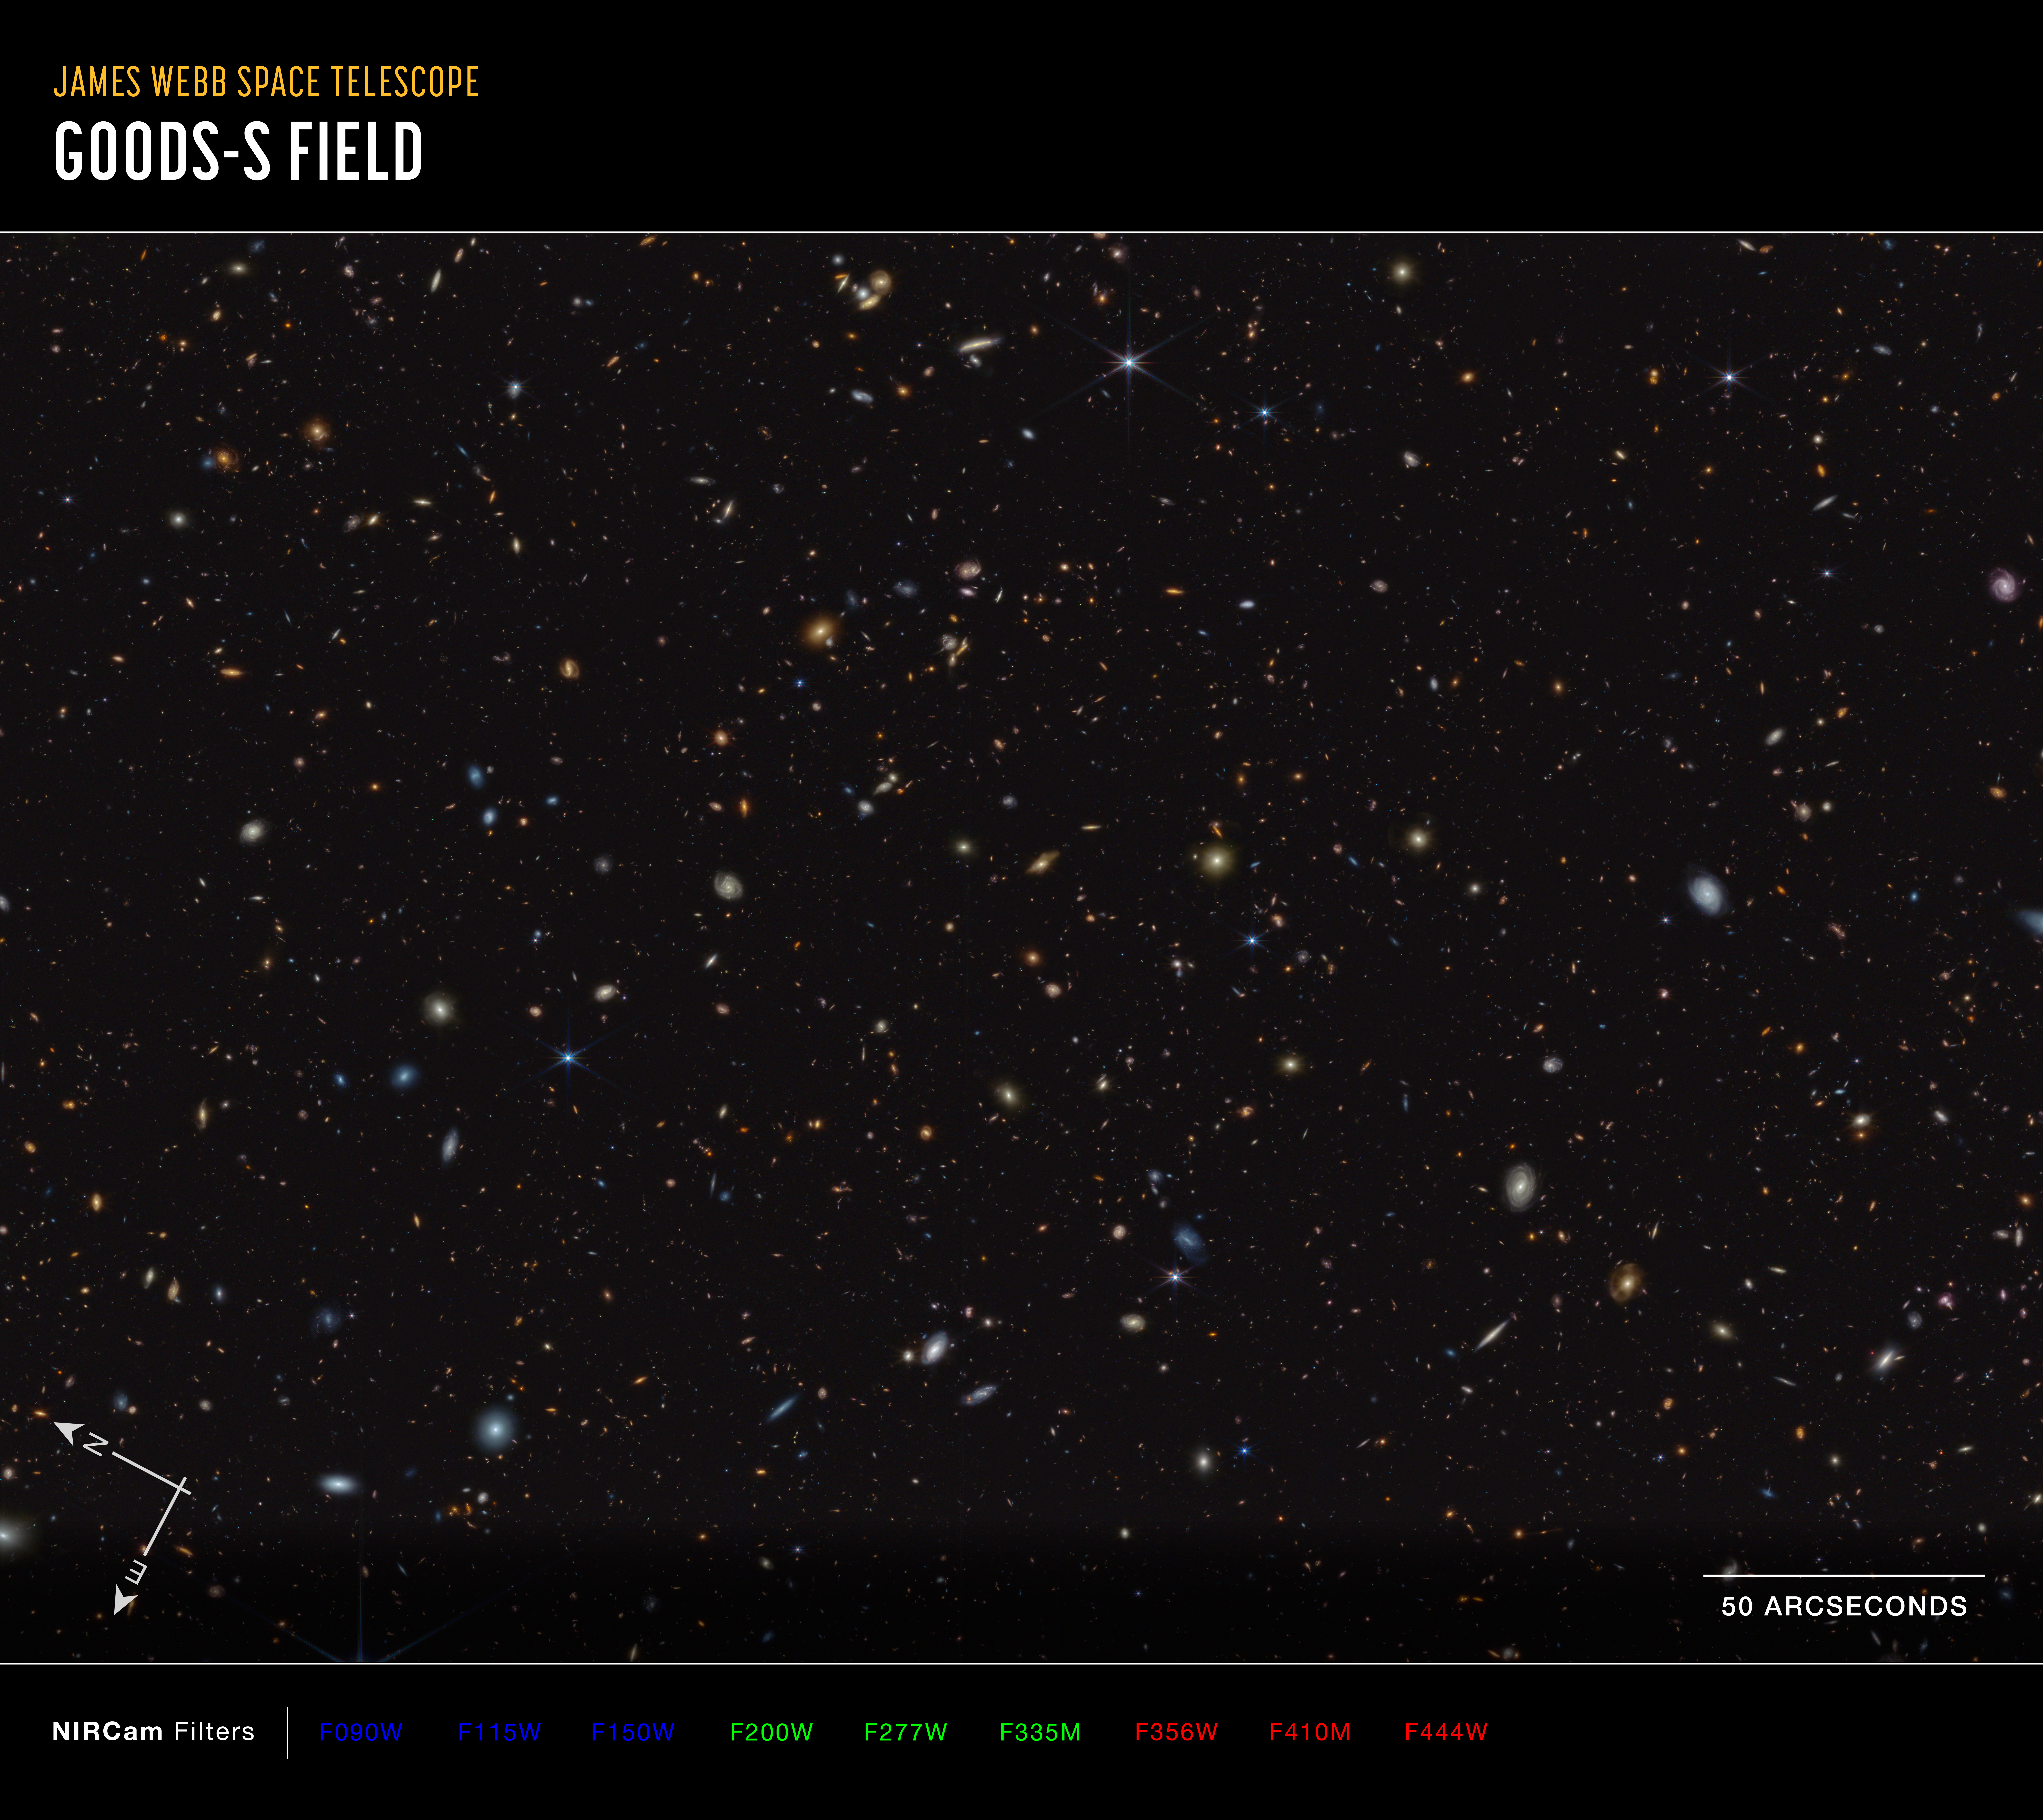

GOODS-S field (NIRCam image, annotated)

How did the first stars and galaxies form? The NASA/ESA/CSA James Webb Space Telescope is already providing new insights into this question. One of the largest programs in Webb’s first year of science is the JWST Advanced Deep Extragalactic Survey, or JADES, which will devote about 32 days of telescope time to uncover and characterize faint, distant galaxies. While the data are still coming in, JADES already has discovered hundreds of galaxies that existed when the Universe was less than 600 million years old. The team also has identified galaxies sparkling with a multitude of young, hot stars.

This infrared image shows a portion of an area of the sky known as GOODS-South, which has been well studied by the NASA/ESA Hubble Space Telescope and other observatories. More than 45,000 galaxies are visible here.

Using these and other data, the JADES team has discovered hundreds of galaxies that existed when the Universe was less than 600 million years old. The sheer number of these galaxies was far beyond predictions from observations made before Webb’s launch. The team also has identified galaxies that existed during a time known as the Epoch of Reionization, when the Universe underwent a transformation from opaque to transparent. Many of these galaxies shown unusually strong emission line signatures due to the creation of multitudes of hot, massive stars.

In this image, blue, green, and red were assigned to Webb’s NIRCam (Near-Infrared Camera) data at 0.9, 1.15, and 1.5 microns; 2.0, 2.77, and 3.55 microns; and 3.56, 4.1, and 4.44 microns (F090W, F115W, and F150W; F200W, F277W, and F335M; and F356W, F410M, and F444W), respectively.

Credit: NASA, ESA, CSA, B. Robertson (UC Santa Cruz), B. Johnson (Center for Astrophysics, Harvard & Smithsonian), S. Tacchella (University of Cambridge, M. Rieke (Univ. of Arizona), D. Eisenstein (Center for Astrophysics, Harvard & Smithsonian), A. Pagan (STScI)